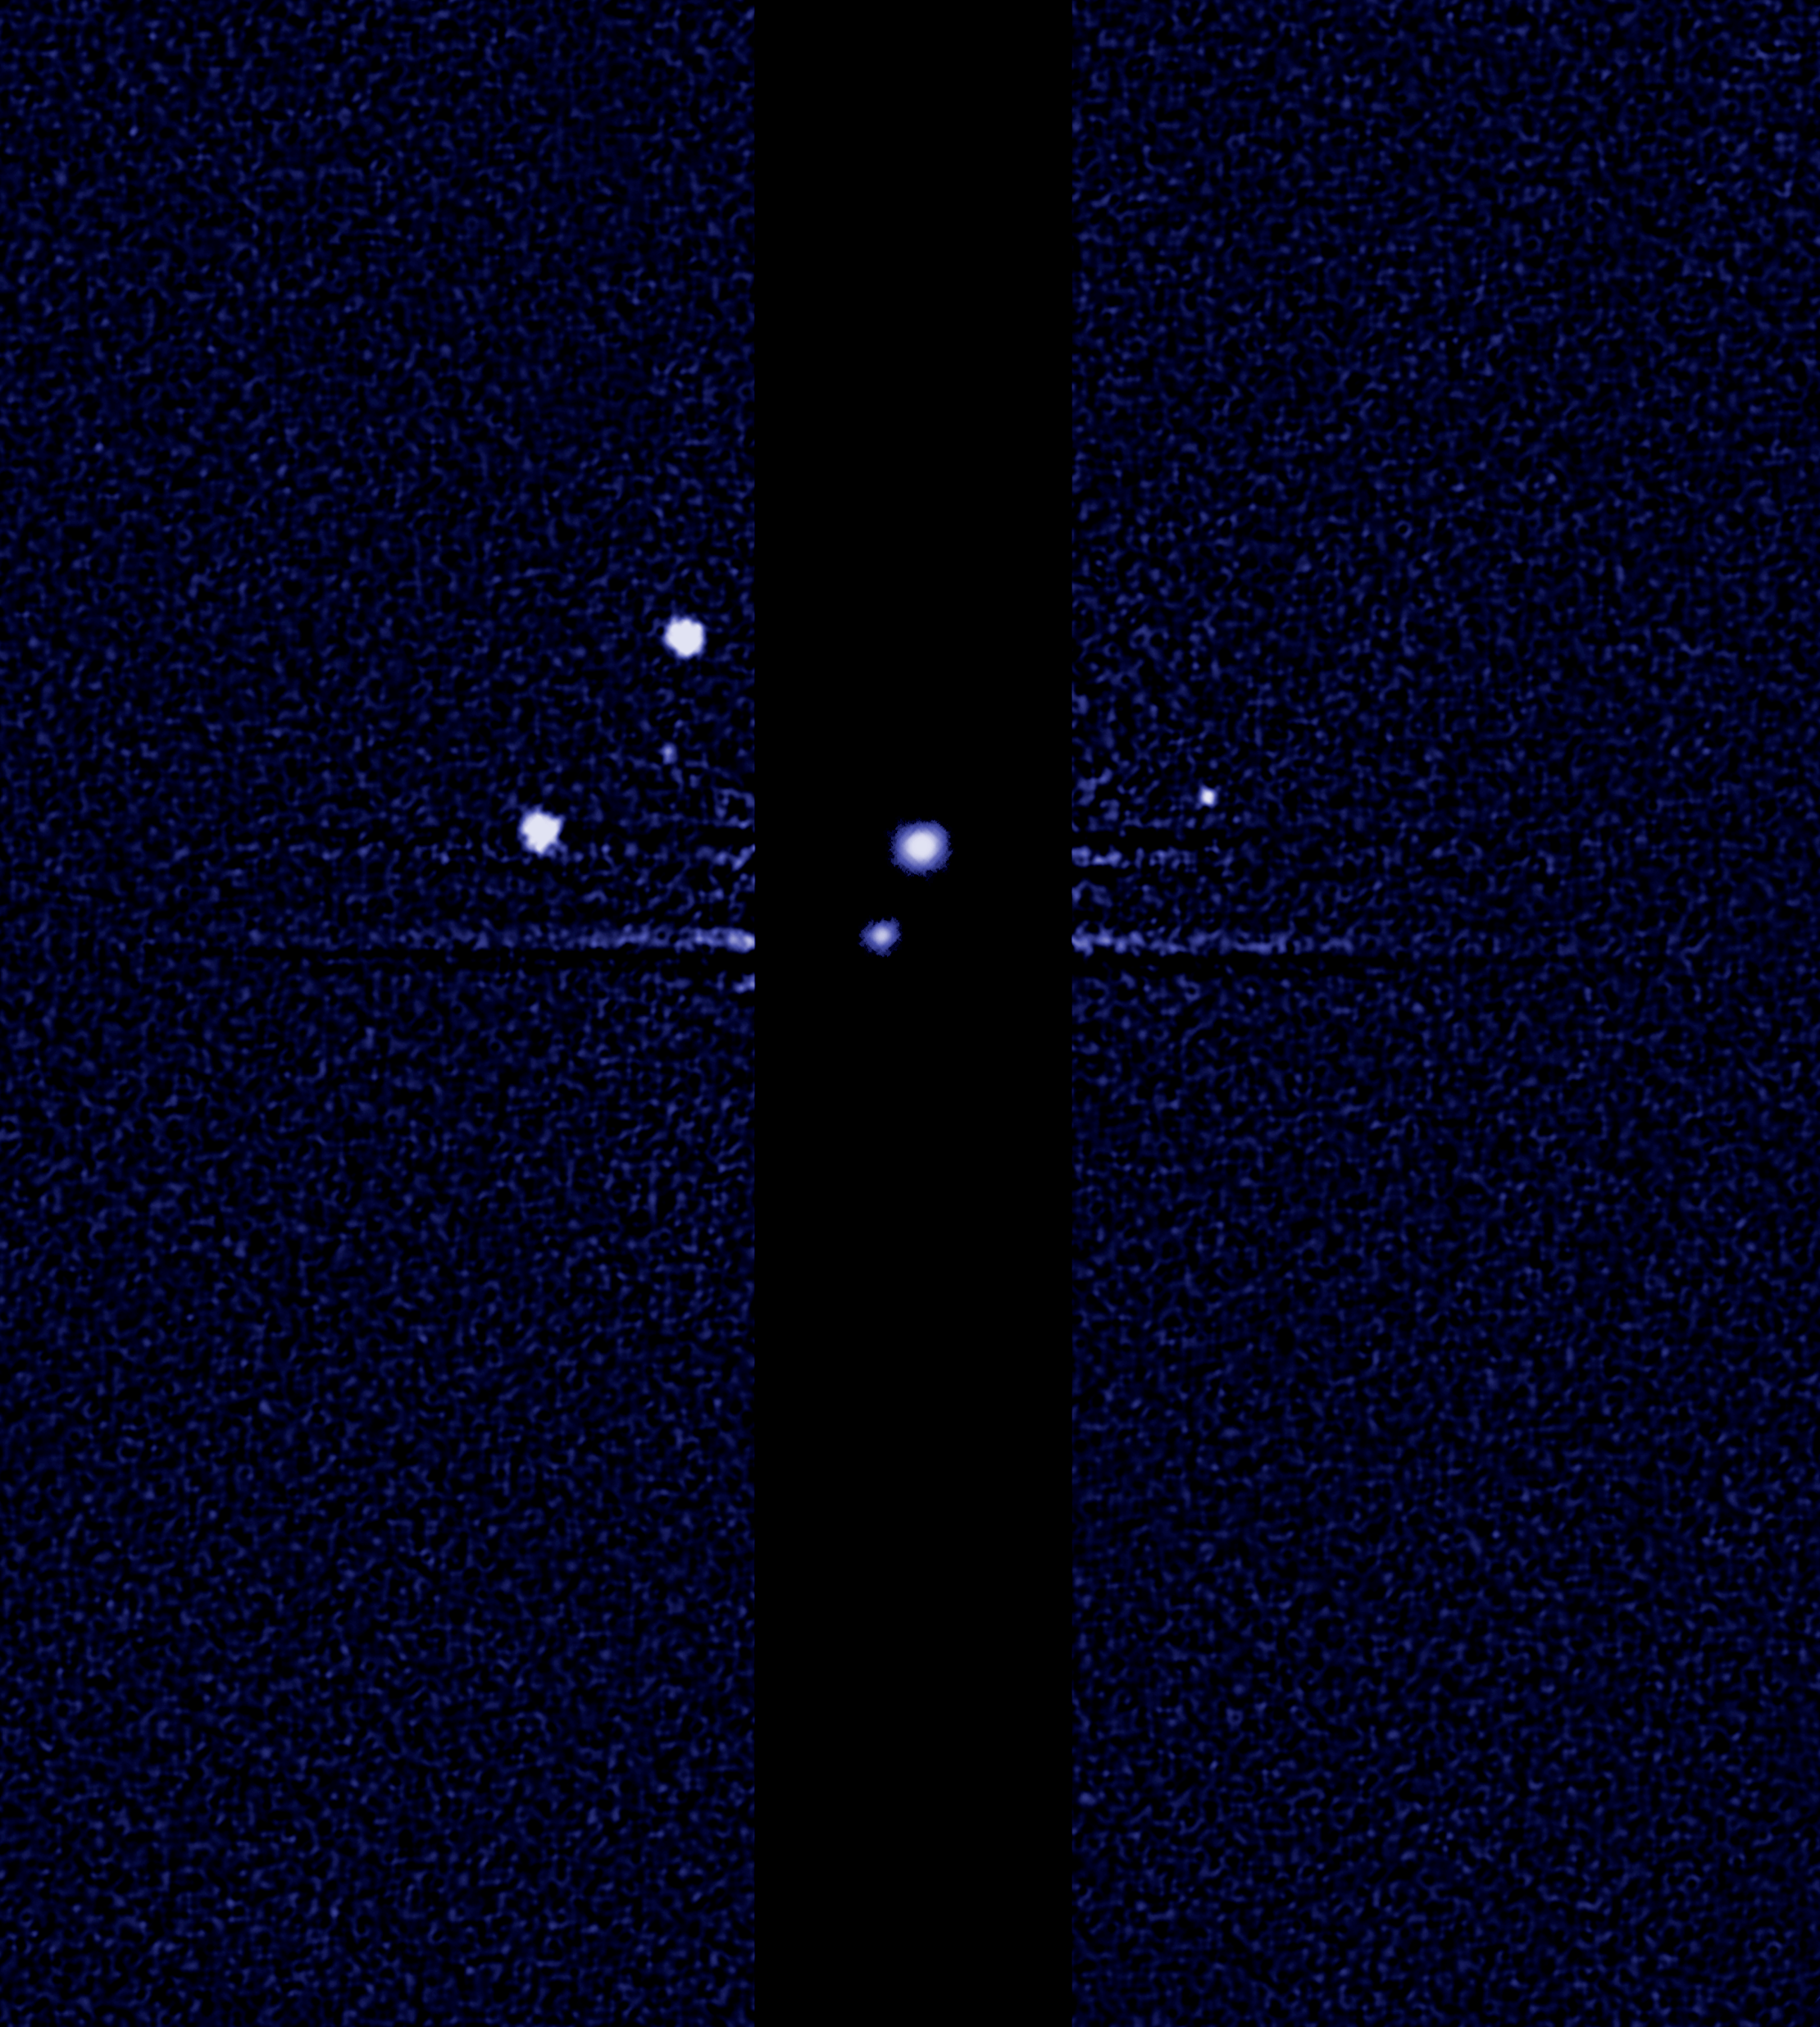

Hubble finds fifth moon orbiting Pluto (unlabelled)

This image, taken by the NASA/ESA Hubble Space Telescope, shows five moons orbiting the distant, icy dwarf planet Pluto, including a newly discovered moon, designated S/2012 (134340) 1, or P5, as photographed by Hubble’s Wide Field Camera 3 on 7 July 2012.

Other observations that collectively show the moon’s orbital motion were taken on 26, 27 and 29 June and on July 9.

The moon is estimated to be 10 to 25 kilometres across. It is in a 95 000 kilometre diameter circular orbit around Pluto that is assumed to be aligned in the same plane as the other satellites in the system.

The darker stripe in the centre of the image is because the picture is constructed from a long exposure designed to capture the comparatively faint satellites of Nix, Hydra, P4 and S/2012 (134340) 1, and a shorter exposure to capture Pluto and Charon, which are much brighter.

Credit: NASA, ESA, and M. Showalter (SETI Institute)